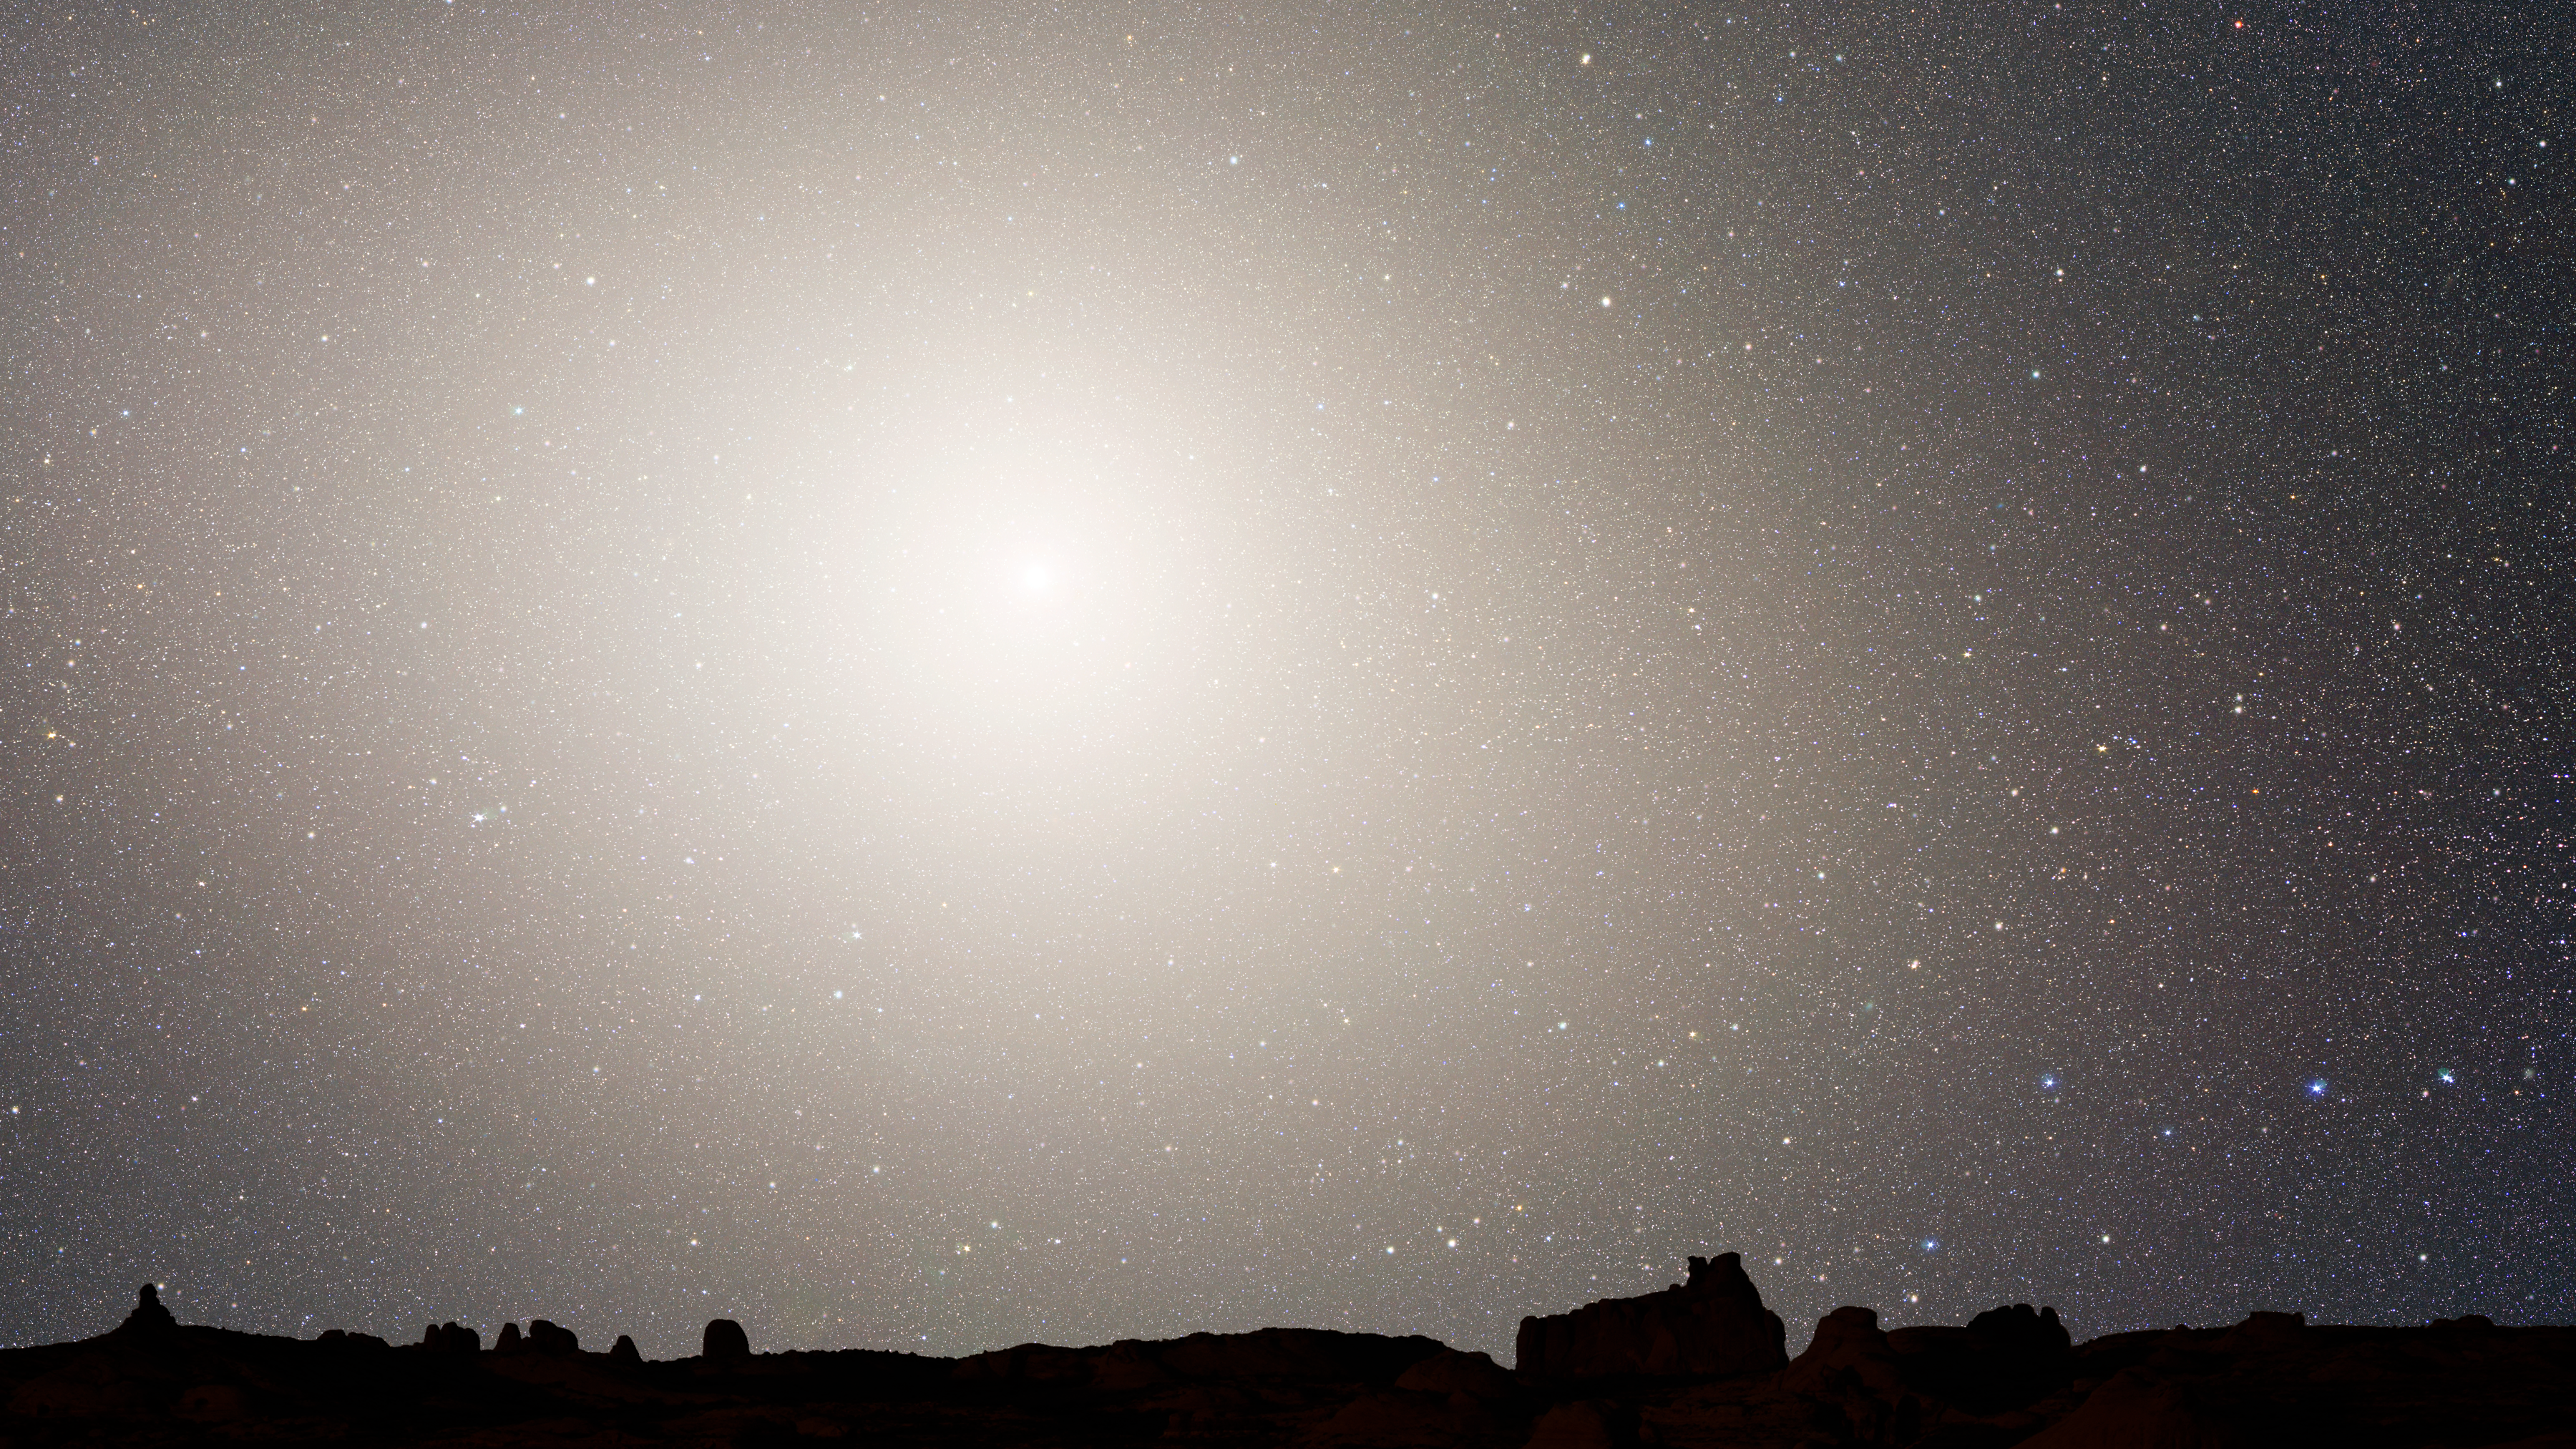

Nighttime Sky View of Future Galaxy Merger: 7 Billion Years

The merged galaxies form a huge elliptical galaxy, its bright core dominating the nighttime sky. Scoured of dust and gas, the newly merged elliptical galaxy no longer makes stars and no nebulae appear in the sky. The ageing starry population is no longer concentrated along a plane, but instead fills an ellipsoidal volume.

Credit: NASA, ESA, Z. Levay and R. van der Marel (STScI), T. Hallas, and A. Mellinger